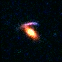

Hubble's Top Ten Gravitational Lenses. A View of HST 16309+8230

HST 16309+8230 is an edge-on disk-like galaxy (blue arc) which has been significantly distorted by the redder lensing elliptical galaxy.

Credit: Kavan Ratnatunga (Carnegie Mellon Univ.) and NASA/ESA